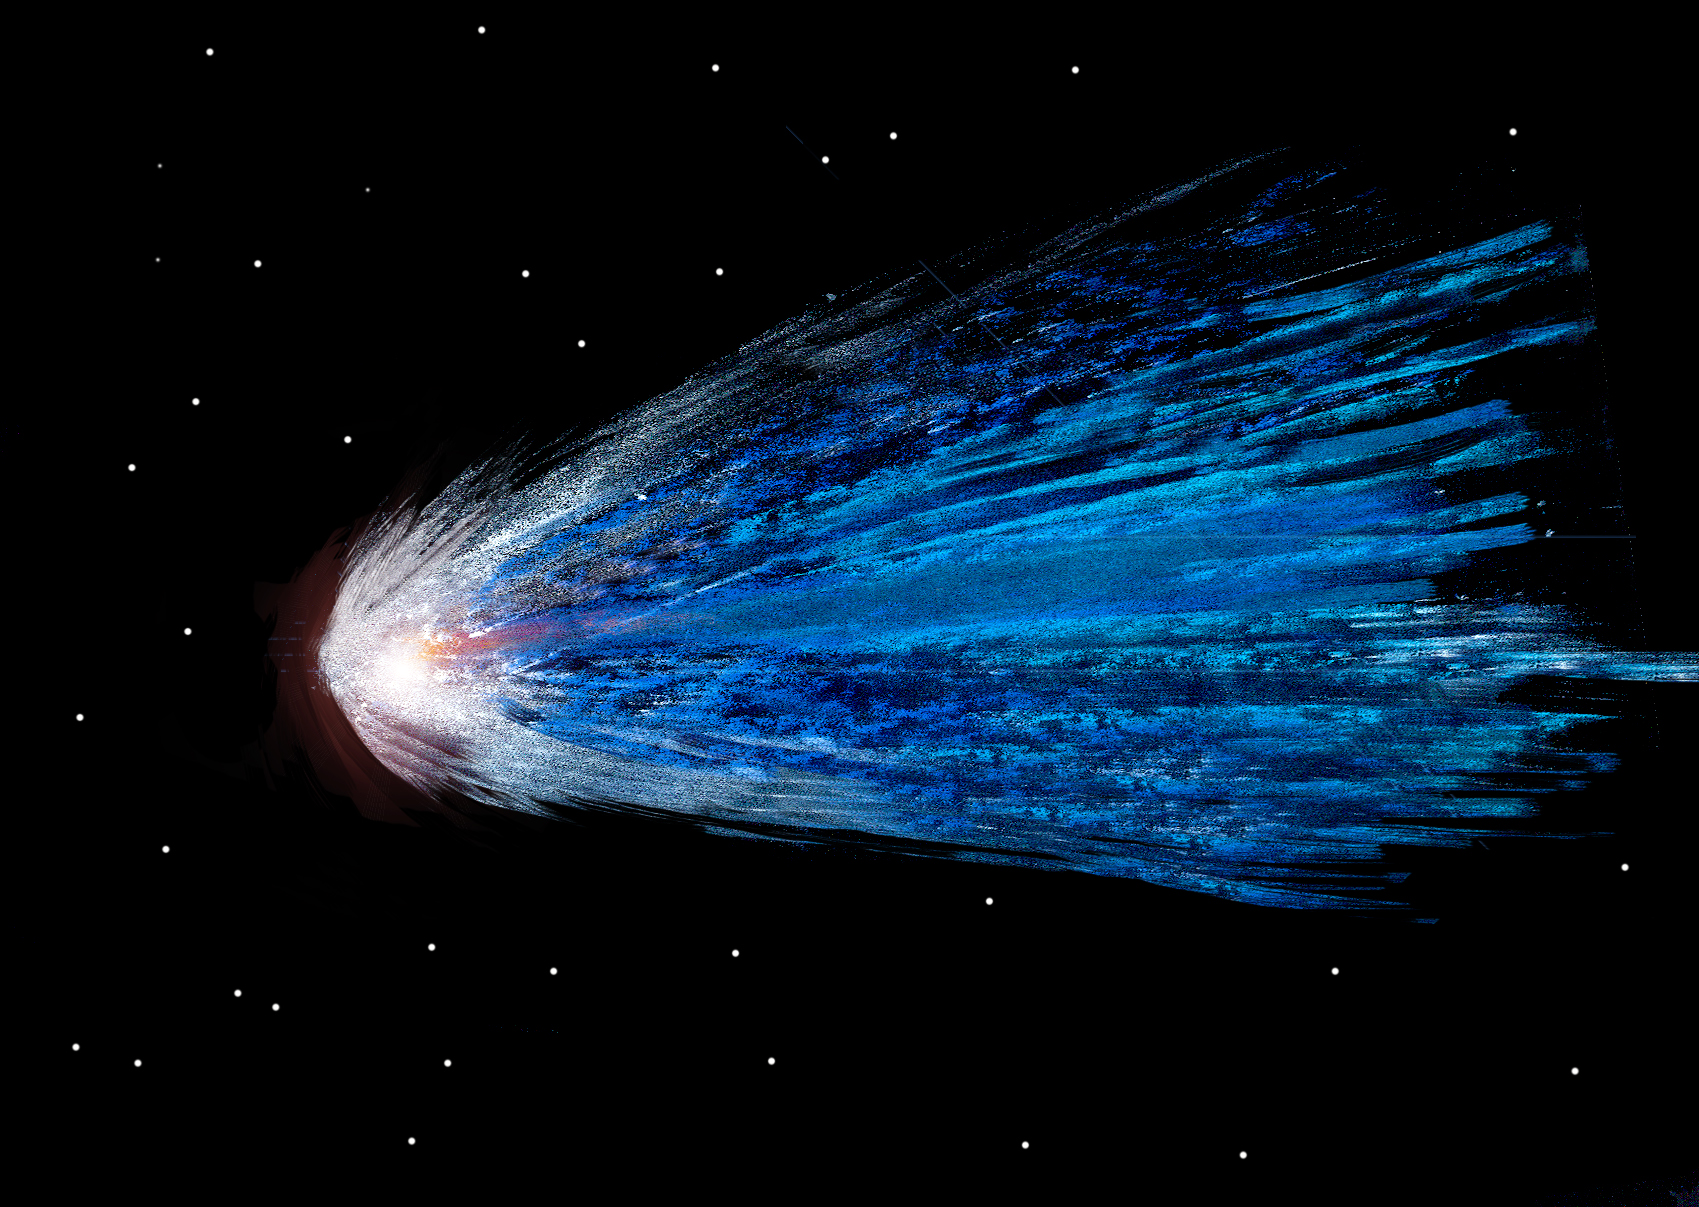

Drawing inspired by Hubble

This image, drawn by 11-year-old Romina Ludena, is one of the first to be uploaded to the new Your Hubble Pictures Flickr page.

The page hosts drawings, paintings, processed astronomical images, models, photographs, cartoons and a range of other content inspired by Hubble and made by you.

Credit: Romina Ludena